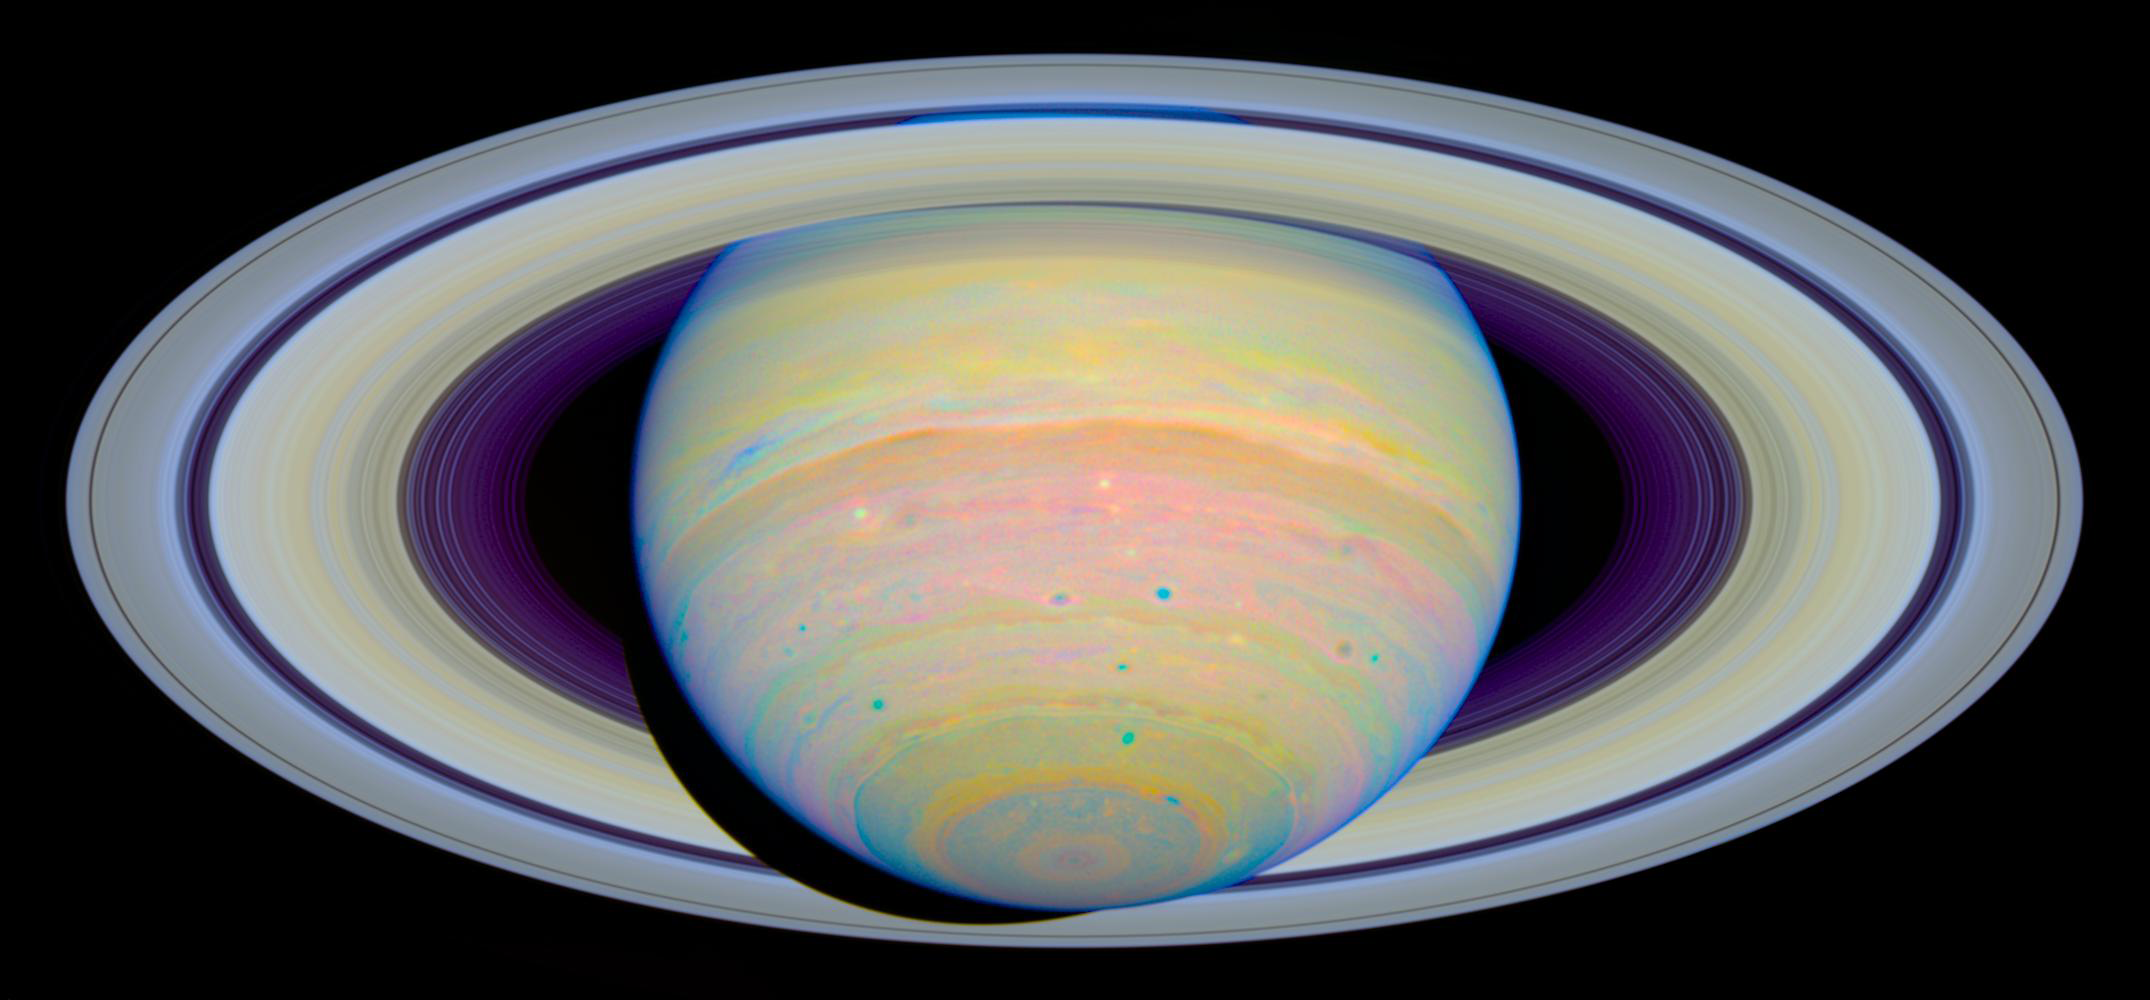

Colour-Stretched Visible-Light Composite of Saturn

Cassini image of Saturn taken at a range of 15.1 million miles (24.3 million kilometers) from the planet. The view is from 13 degrees below the equator.

Credit: NASA, ESA and E. Karkoschka (University of Arizona)